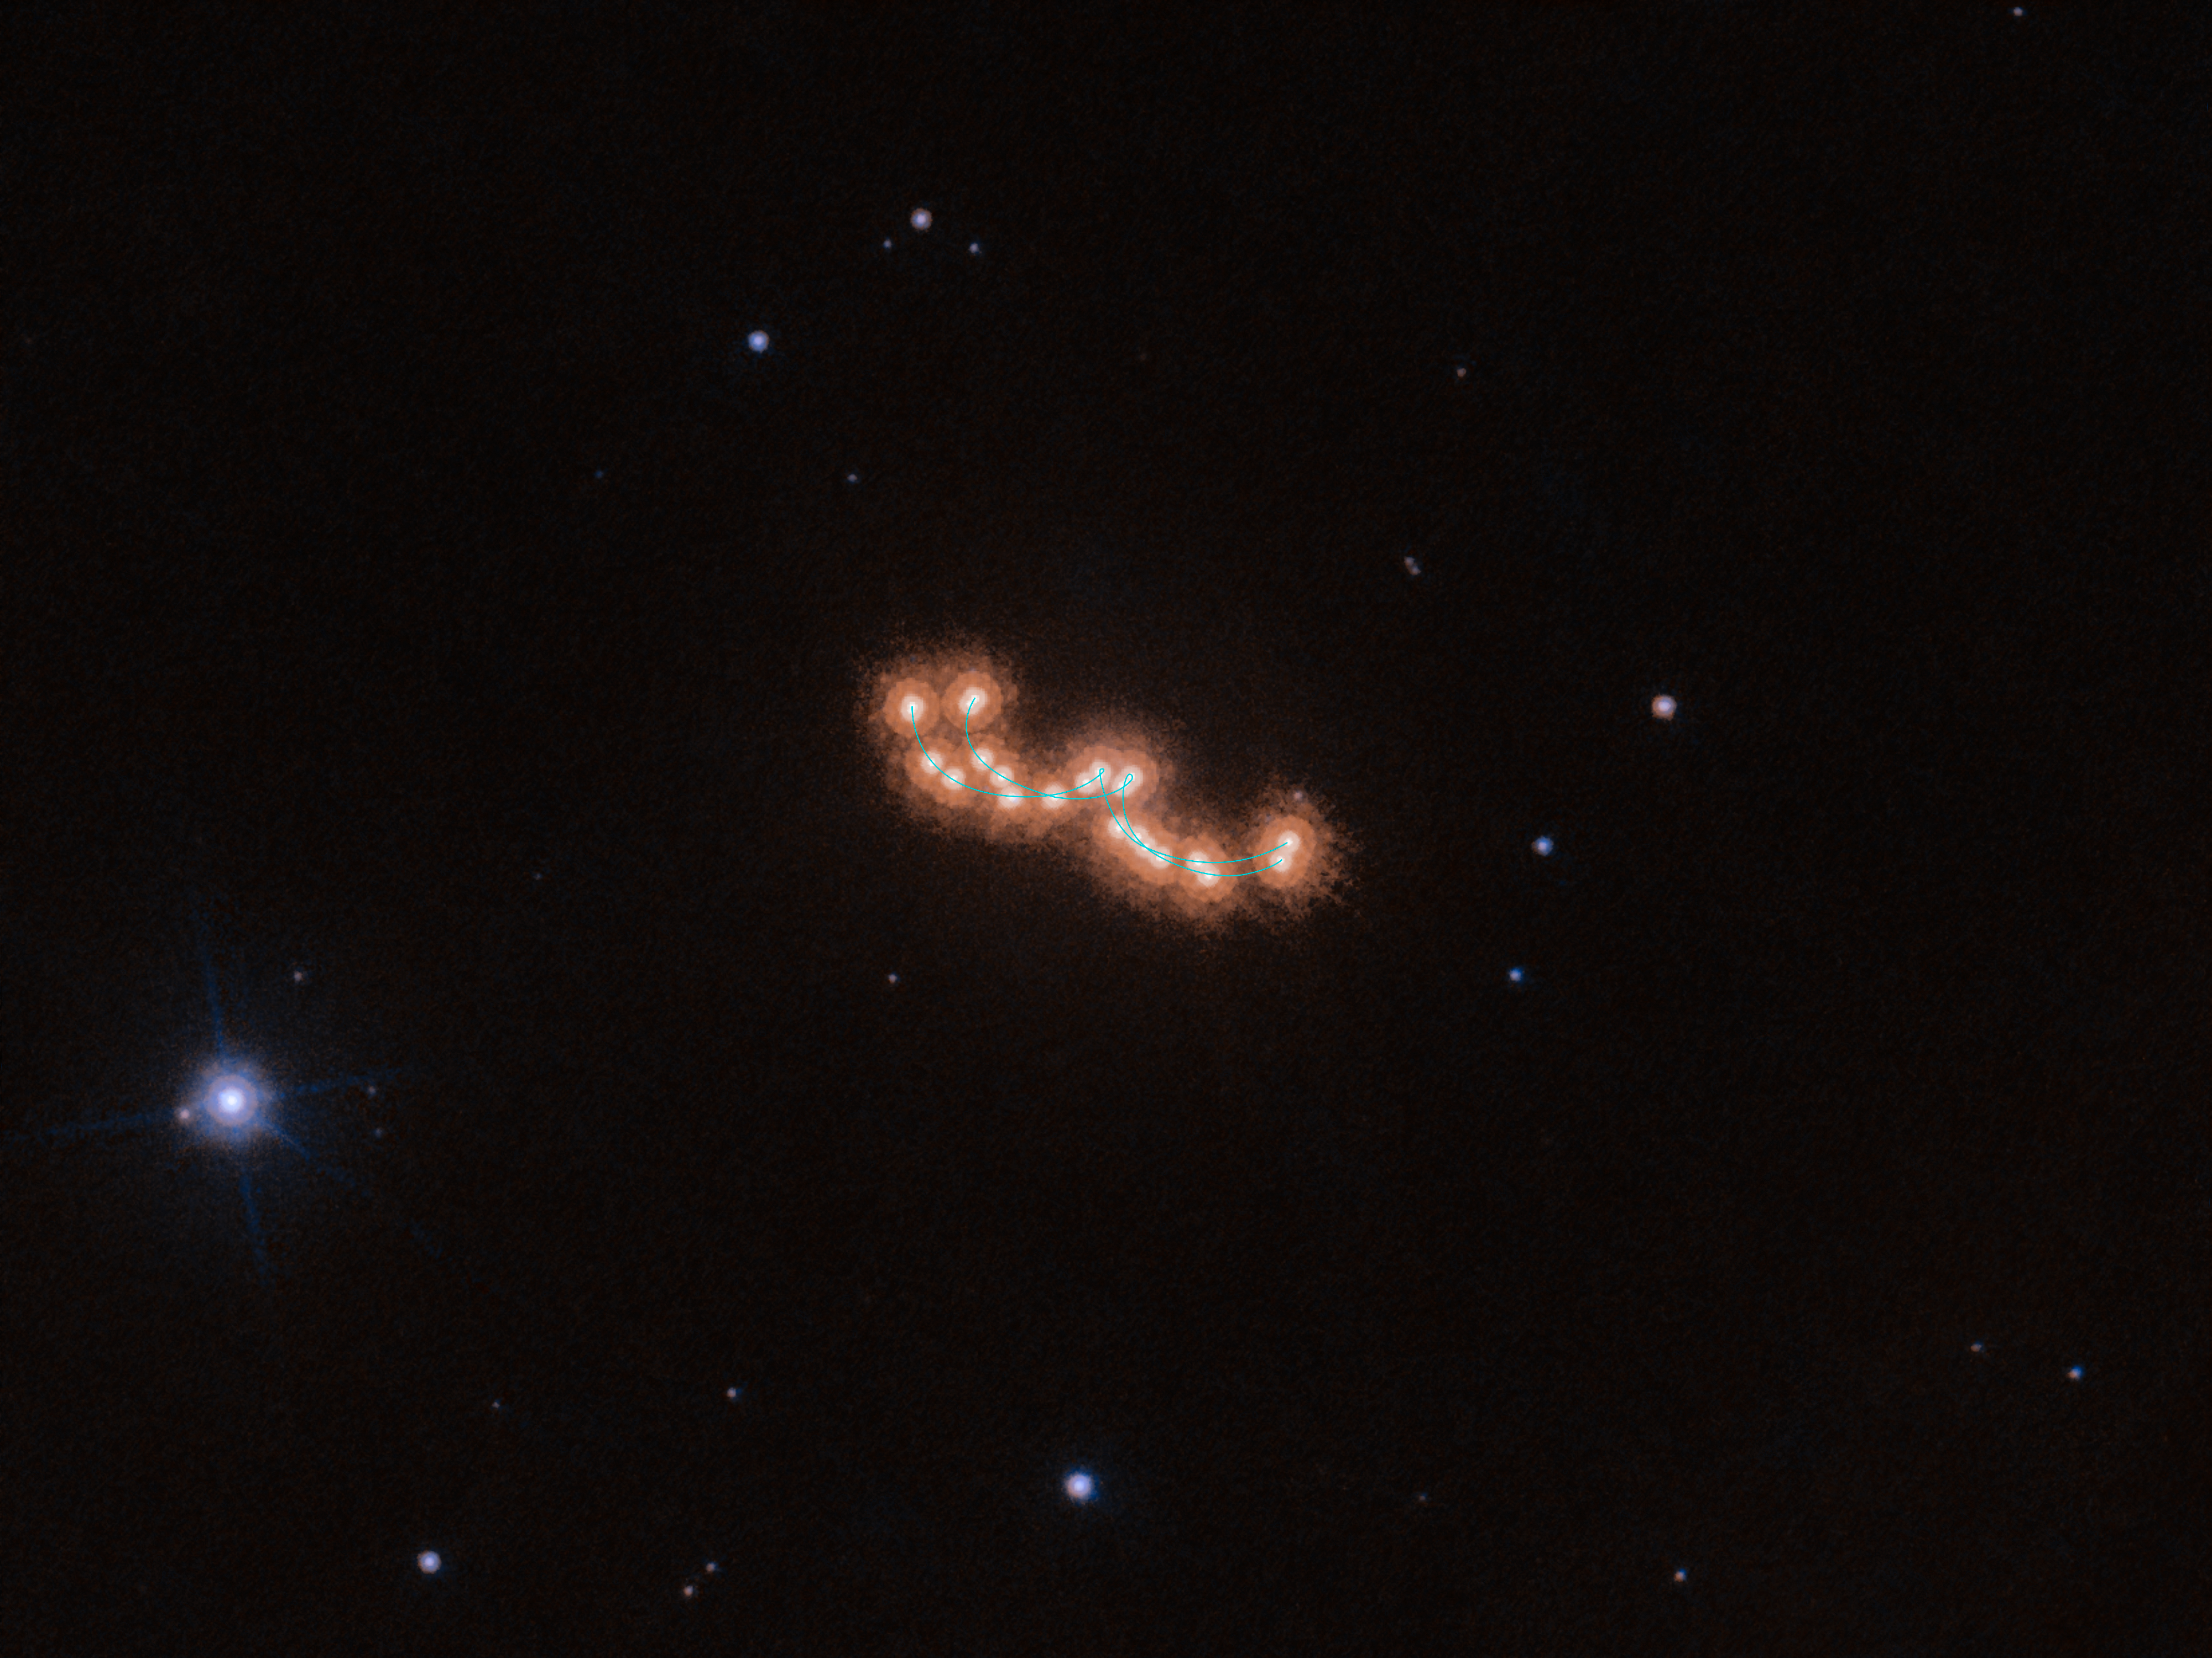

Waltzing dwarfs

This seemingly unspectacular series of dots with varying distances between them actually shows the slow waltz of two brown dwarfs. The image is a stack of 12 images made over the course of three years with the NASA/ESA Hubble Space Telescope. Using high-precision astrometry, an Italian-led team of astronomers tracked the two components of the system as they moved both across the sky and around each other.

The observed system, Luhman 16AB, is only about six light-years away and is the third closest stellar system to Earth — after the triple star system Alpha Centauri and Barnard’s Star. Despite its proximity, Luhman 16AB was only discovered in 2013 by the astronomer Kevin Luhman. The two brown dwarfs that make up the system, Luhman 16A and Luhman 16B, orbit each other at a distance of only three times the distance between the Earth and the Sun, and so these observations are a showcase for Hubble’s precision and high resolution.

The astronomers using Hubble to study Luhman 16AB were not only interested in the waltz of the two brown dwarfs, but were also searching for a third, invisible, dancing partner. Earlier observations with ESO’s Very Large Telescope indicated the presence of an exoplanet in the system. The team wanted to verify this claim by analysing the movement of the brown dwarfs in great detail over a long period of time, but the Hubble data showed that the two dwarfs are indeed dancing alone, unperturbed by a massive planetary companion.

Credit: ESA/Hubble & NASA, L. Bedin et al.